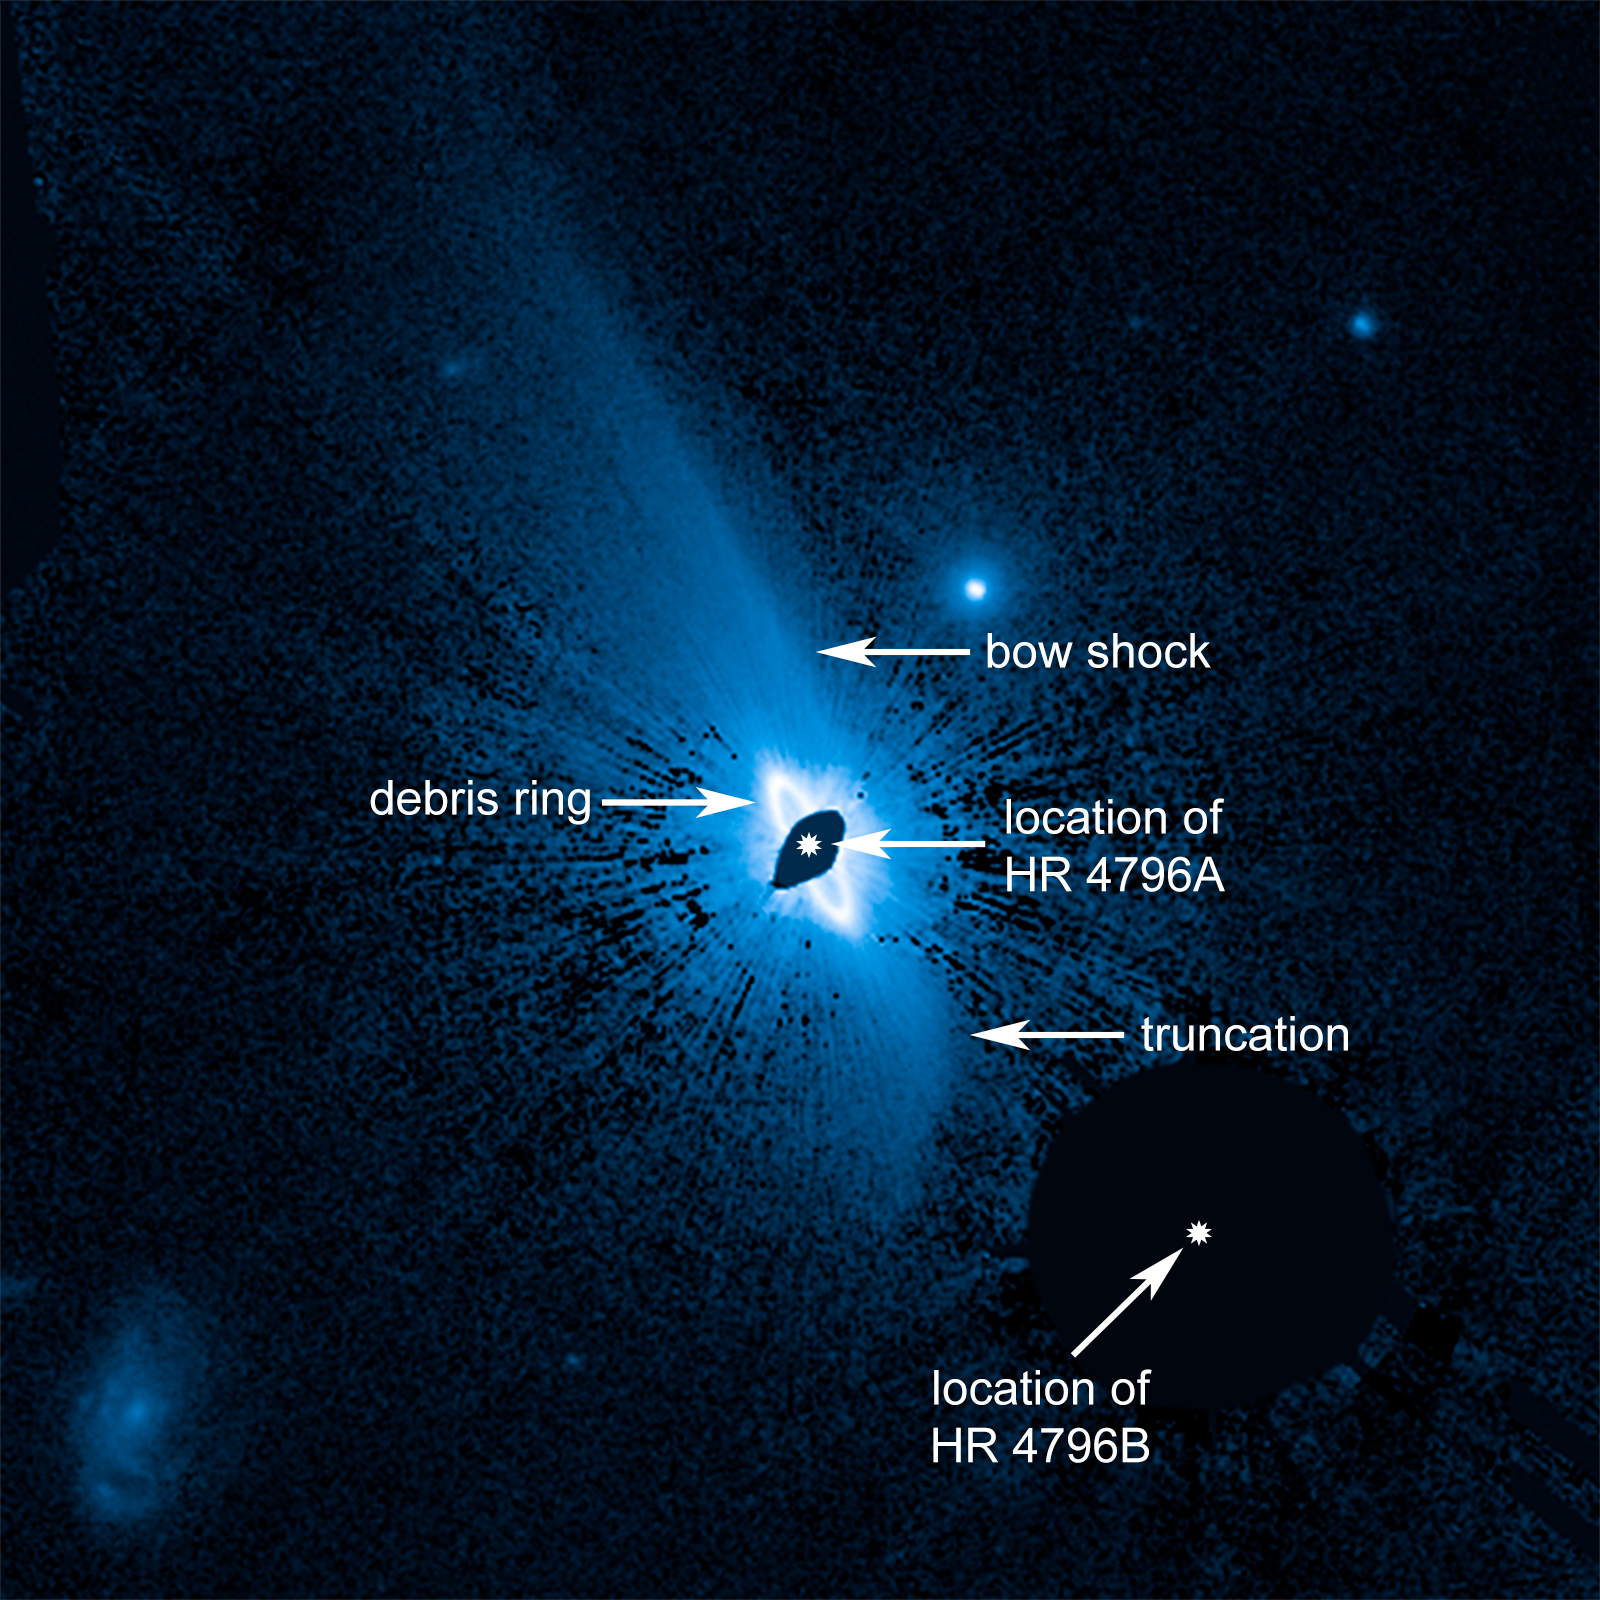

Huge system of dusty material enveloping the young star HR 4796A

This is an image from the NASA/ESA Hubble Space Telescope showing a vast, complex dust structure, about 240 billion kilometres across, enveloping the young star HR 4796A. A bright, narrow inner ring of dust is already known to encircle the star and may have been corralled by the gravitational pull of an unseen giant planet. This newly discovered huge dust structure around the system may have implications for what this yet-unseen planetary system looks like around the 8-million-year-old star, which is in its formative years of planet construction. The debris field of very fine dust was likely created from collisions among developing infant planets near the star, evidenced by a bright ring of dusty debris seen 11 billion kilometres from the star. The pressure of starlight from the star, which is 23 times more luminous than the Sun, then expelled the dust far into space.

Credit: NASA, ESA, and G. Schneider (University of Arizona)